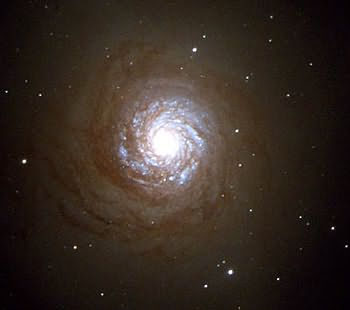

Central region of our HST image of NGC 7252

In NGC 7252, where we had discovered ~40 globular clusters with the Hubble before its refurbishment, we have recently discovered ~500 globulars with the refurbished telescope. Each of bluish pointlike sources is a likely globular.

Credit: B. Whitmore (STScI)